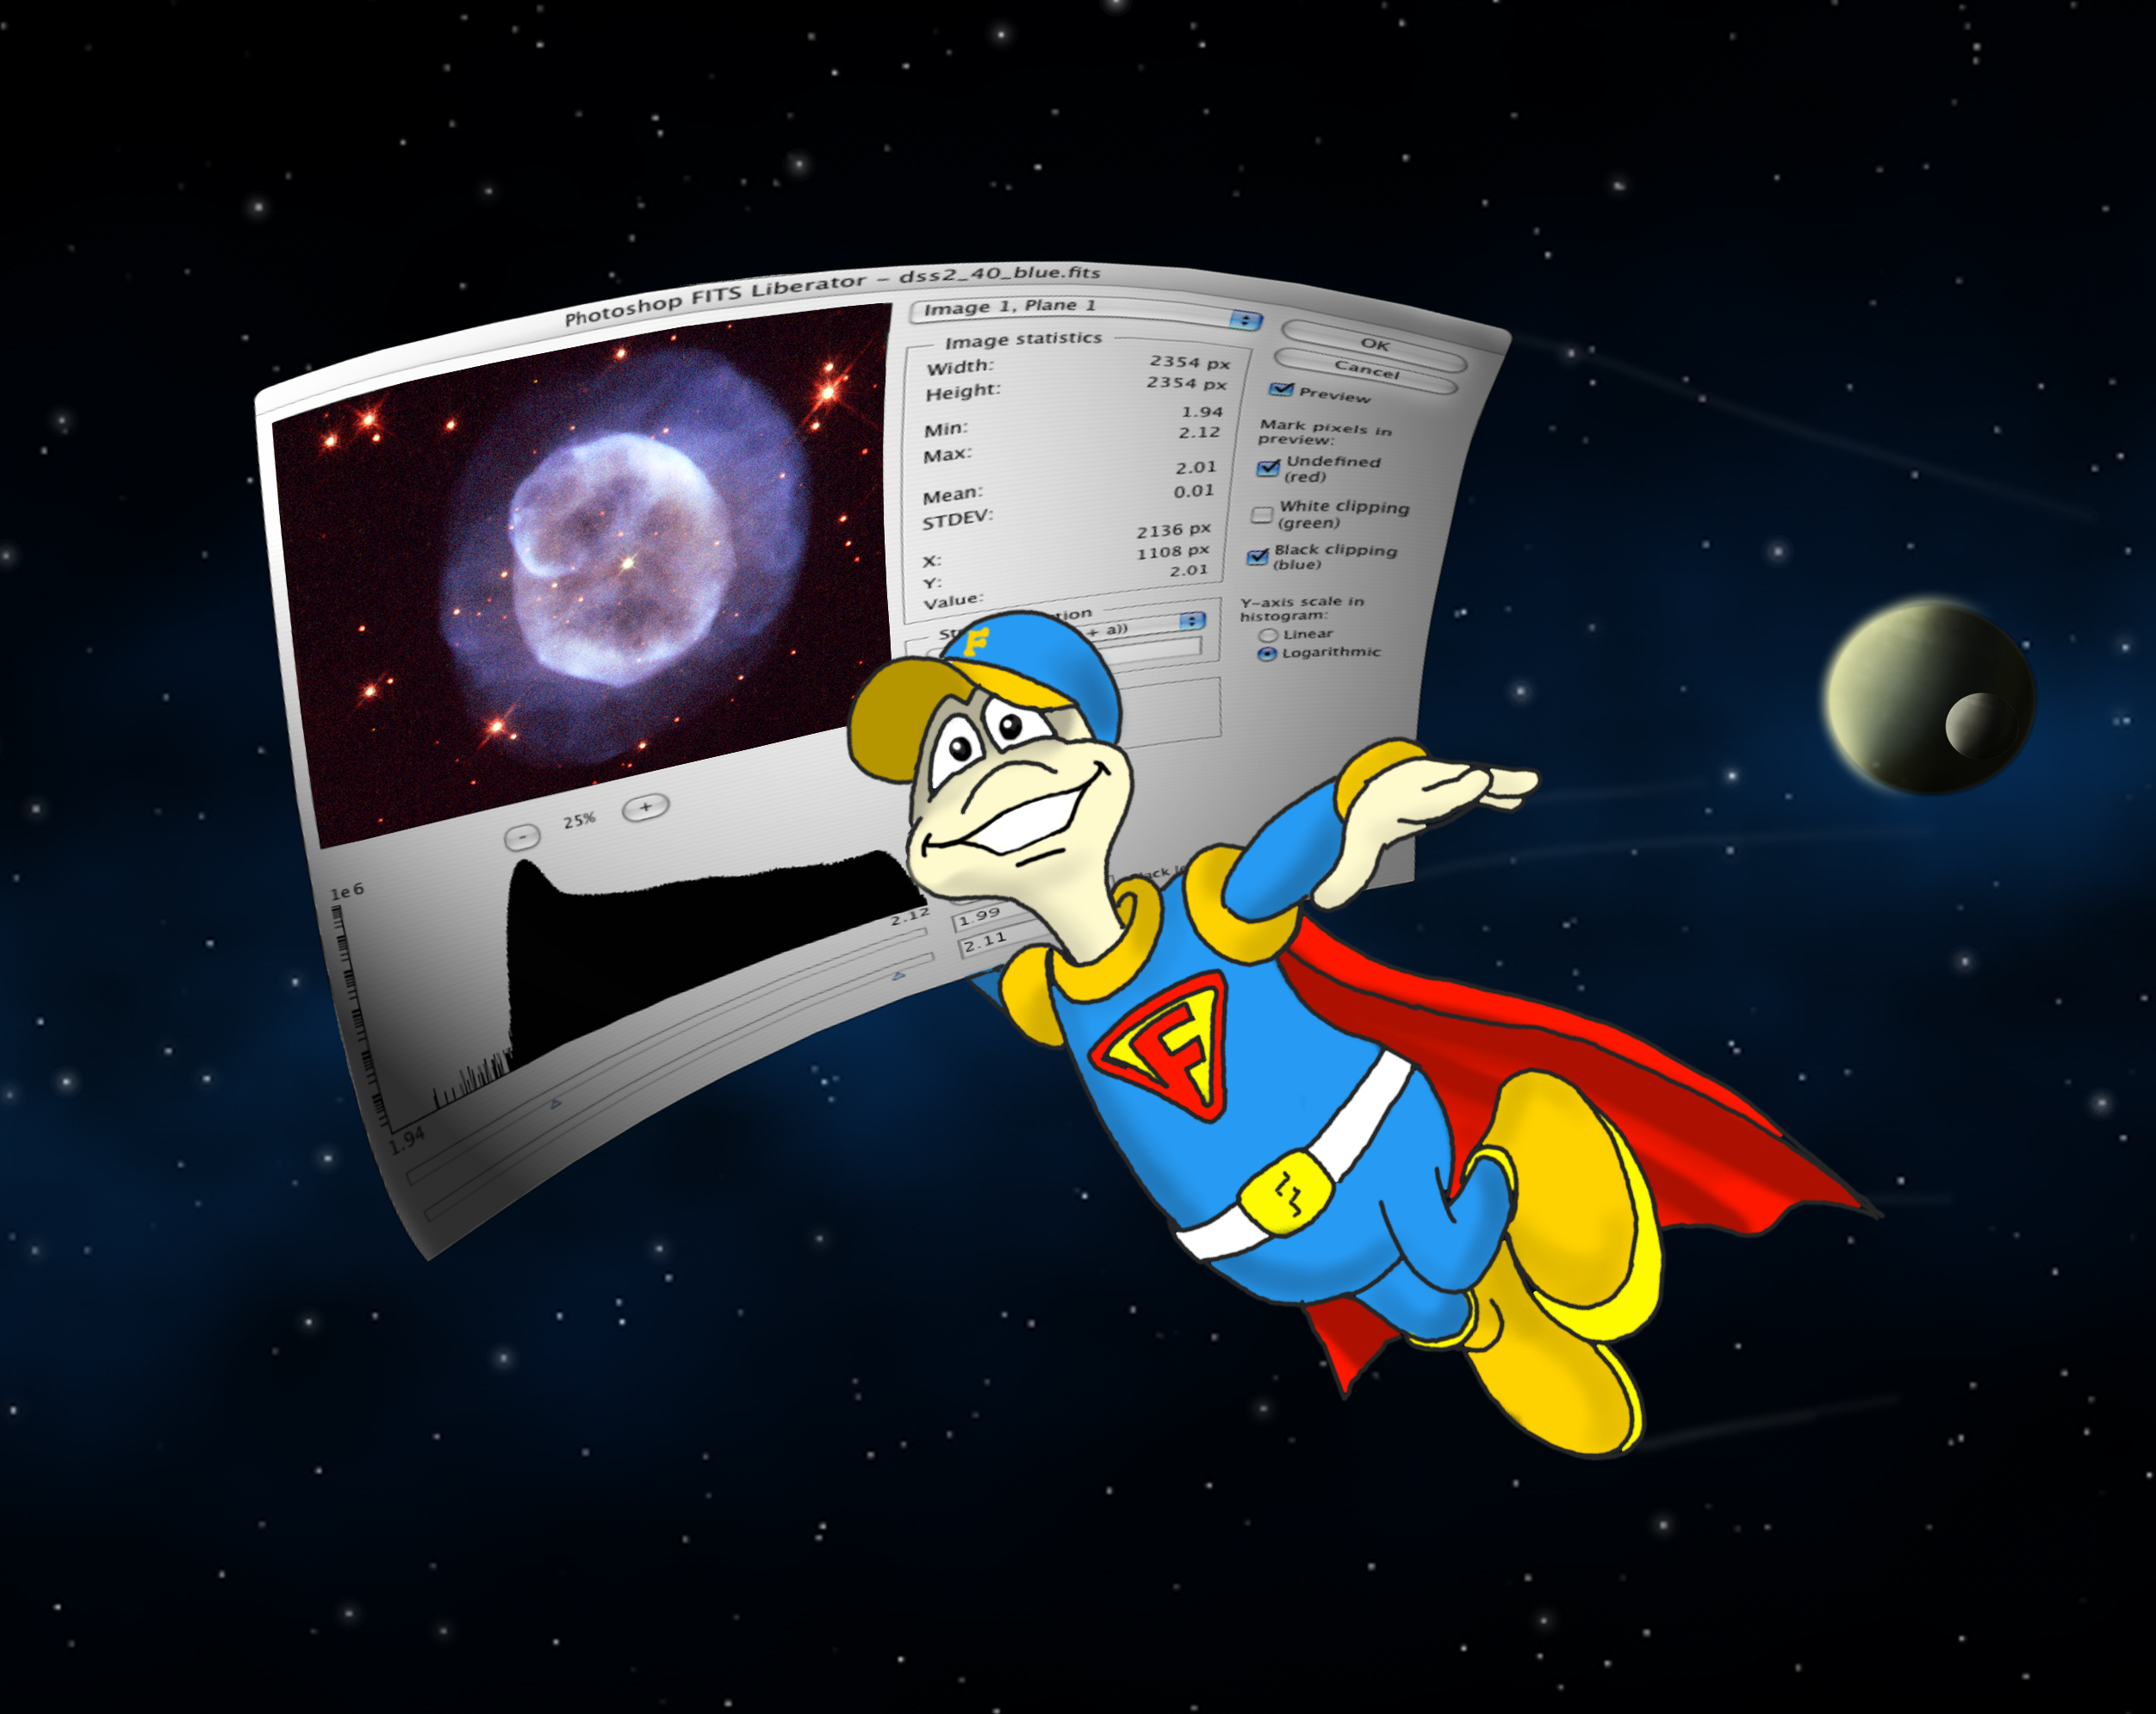

Liberating the FITS format

The ESA/ESO/NASA Photoshop FITS Liberator is here to help all home astronomy enthusiasts waiting to explore the treasure trove of archival astronomical images and spectra from the NASA/ESA Hubble Space Telescope, the European Southern Observatory's Very Large Telescope, the European Space Agency's XMM-Newton X-ray observatory, NASA's Spitzer Space Telescope and many other famous telescopes.

The free software plug-in for Adobe Photoshop¸ or Adobe Photoshop Elements¸ developed by imaging scientists at the European Space Agency, the European Southern Observatory and NASA makes the immense wealth of astronomical images and spectra stored in data archives around the world accessible to the layman.

Credit: ESA, ESO and NASA